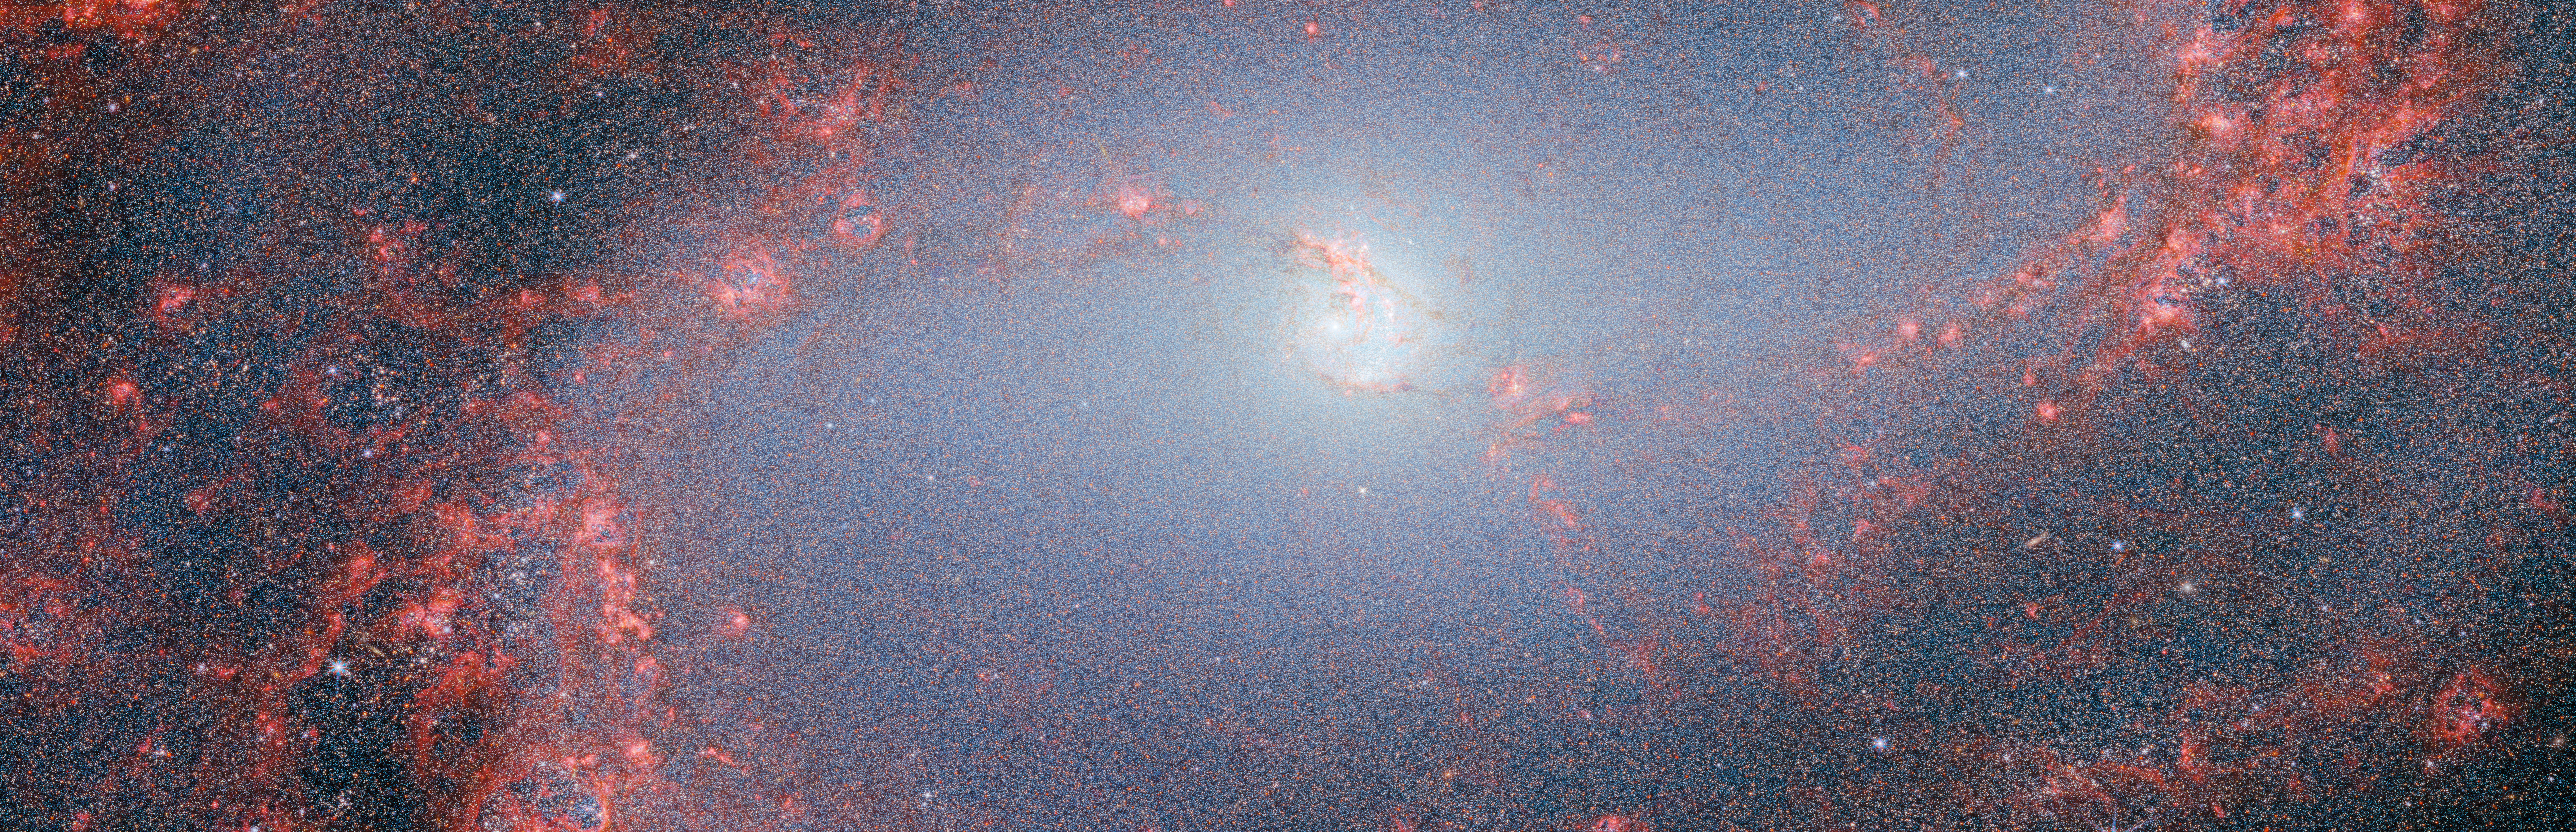

M83 (NIRCam image, scaled)

This image was captured by Webb’s NIRCam, or Near-InfraRed Camera. NIRCam makes observations in the near-infrared, which spans wavelengths of light that are just longer than optical wavelengths. Like MIRI, it is equipped with a range of filters that cover its wavelength range of 0.6 to 5 micrometres, including 29 filters specifically intended for imaging. Data collected through eight of those filters were used to complete this impressive image, which picks out light emitted from the wealth of stars that might be obscured by dust at other wavelengths. Even though stars do not emit the majority of their light in the infrared, optical light is much more vulnerable to being scattered by dust than infrared light is, and so infrared instruments like Webb can provide the best opportunities to study stars in regions (like galaxies) that might also contain large amounts of dust.

In this image, the bright red-pink spots correspond to regions rich in ionised hydrogen, which is due to the presence of newly formed stars. The diffuse gradient of blue light around the central region shows the distribution of older stars. The compact light blue regions within the red, ionised gas, mostly concentrated in the spiral arms, show the distribution of young star clusters.

Credit: ESA/Webb, NASA & CSA, A. Adamo (Stockholm University) and the FEAST JWST team